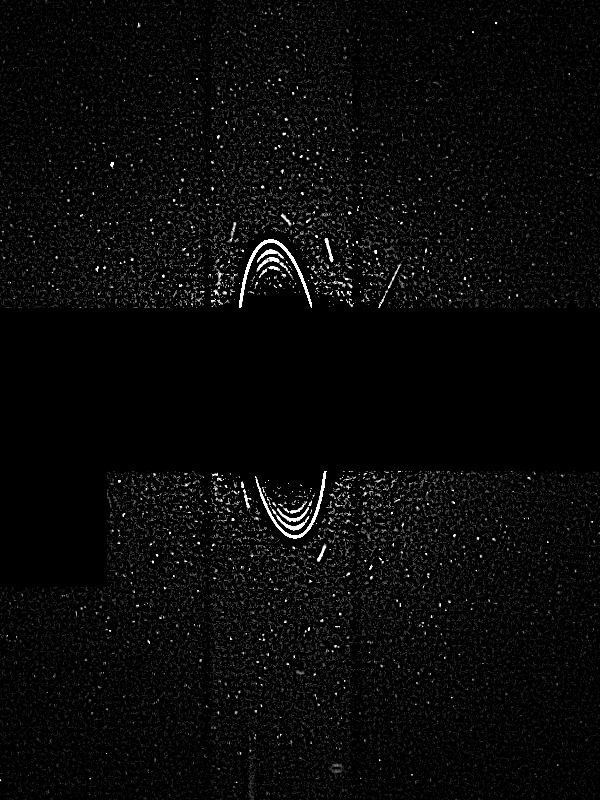

Uranus: Rings, Satellites 22:51 UT

Astronomers have discovered two of the smallest moons yet found around Uranus. The new moons, uncovered by NASA's Hubble Space Telescope, are about 8 to 10 miles across (12 to 16 km) — about the size of San Francisco. The two moons are so faint they eluded detection by the Voyager 2 spacecraft, which discovered 10 small satellites when it flew by the gas giant planet in 1986.

Credit: NASA/ESA, M. Showalter (Stanford University/NASA/ESA Ames Research Center), J. Lissauer (NASA/ESA Ames Research Center)